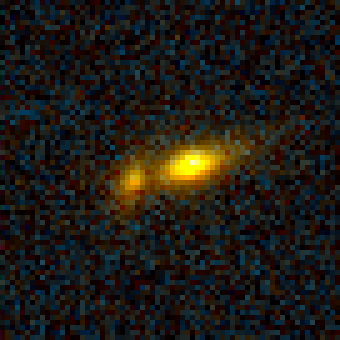

Galaxy Cluster MS1054-03

Exciting Hubble Space Telescope images of more than a dozen very distant colliding galaxies indicate that, at least in some cases, big massive galaxies form through collisions between smaller ones, in a 'generation after generation' never-ending story.

Credit: ESA/NASA, Pieter van Dokkum (University of Groningen/Leiden), Marijn Franx (University of Groningen/Leiden)